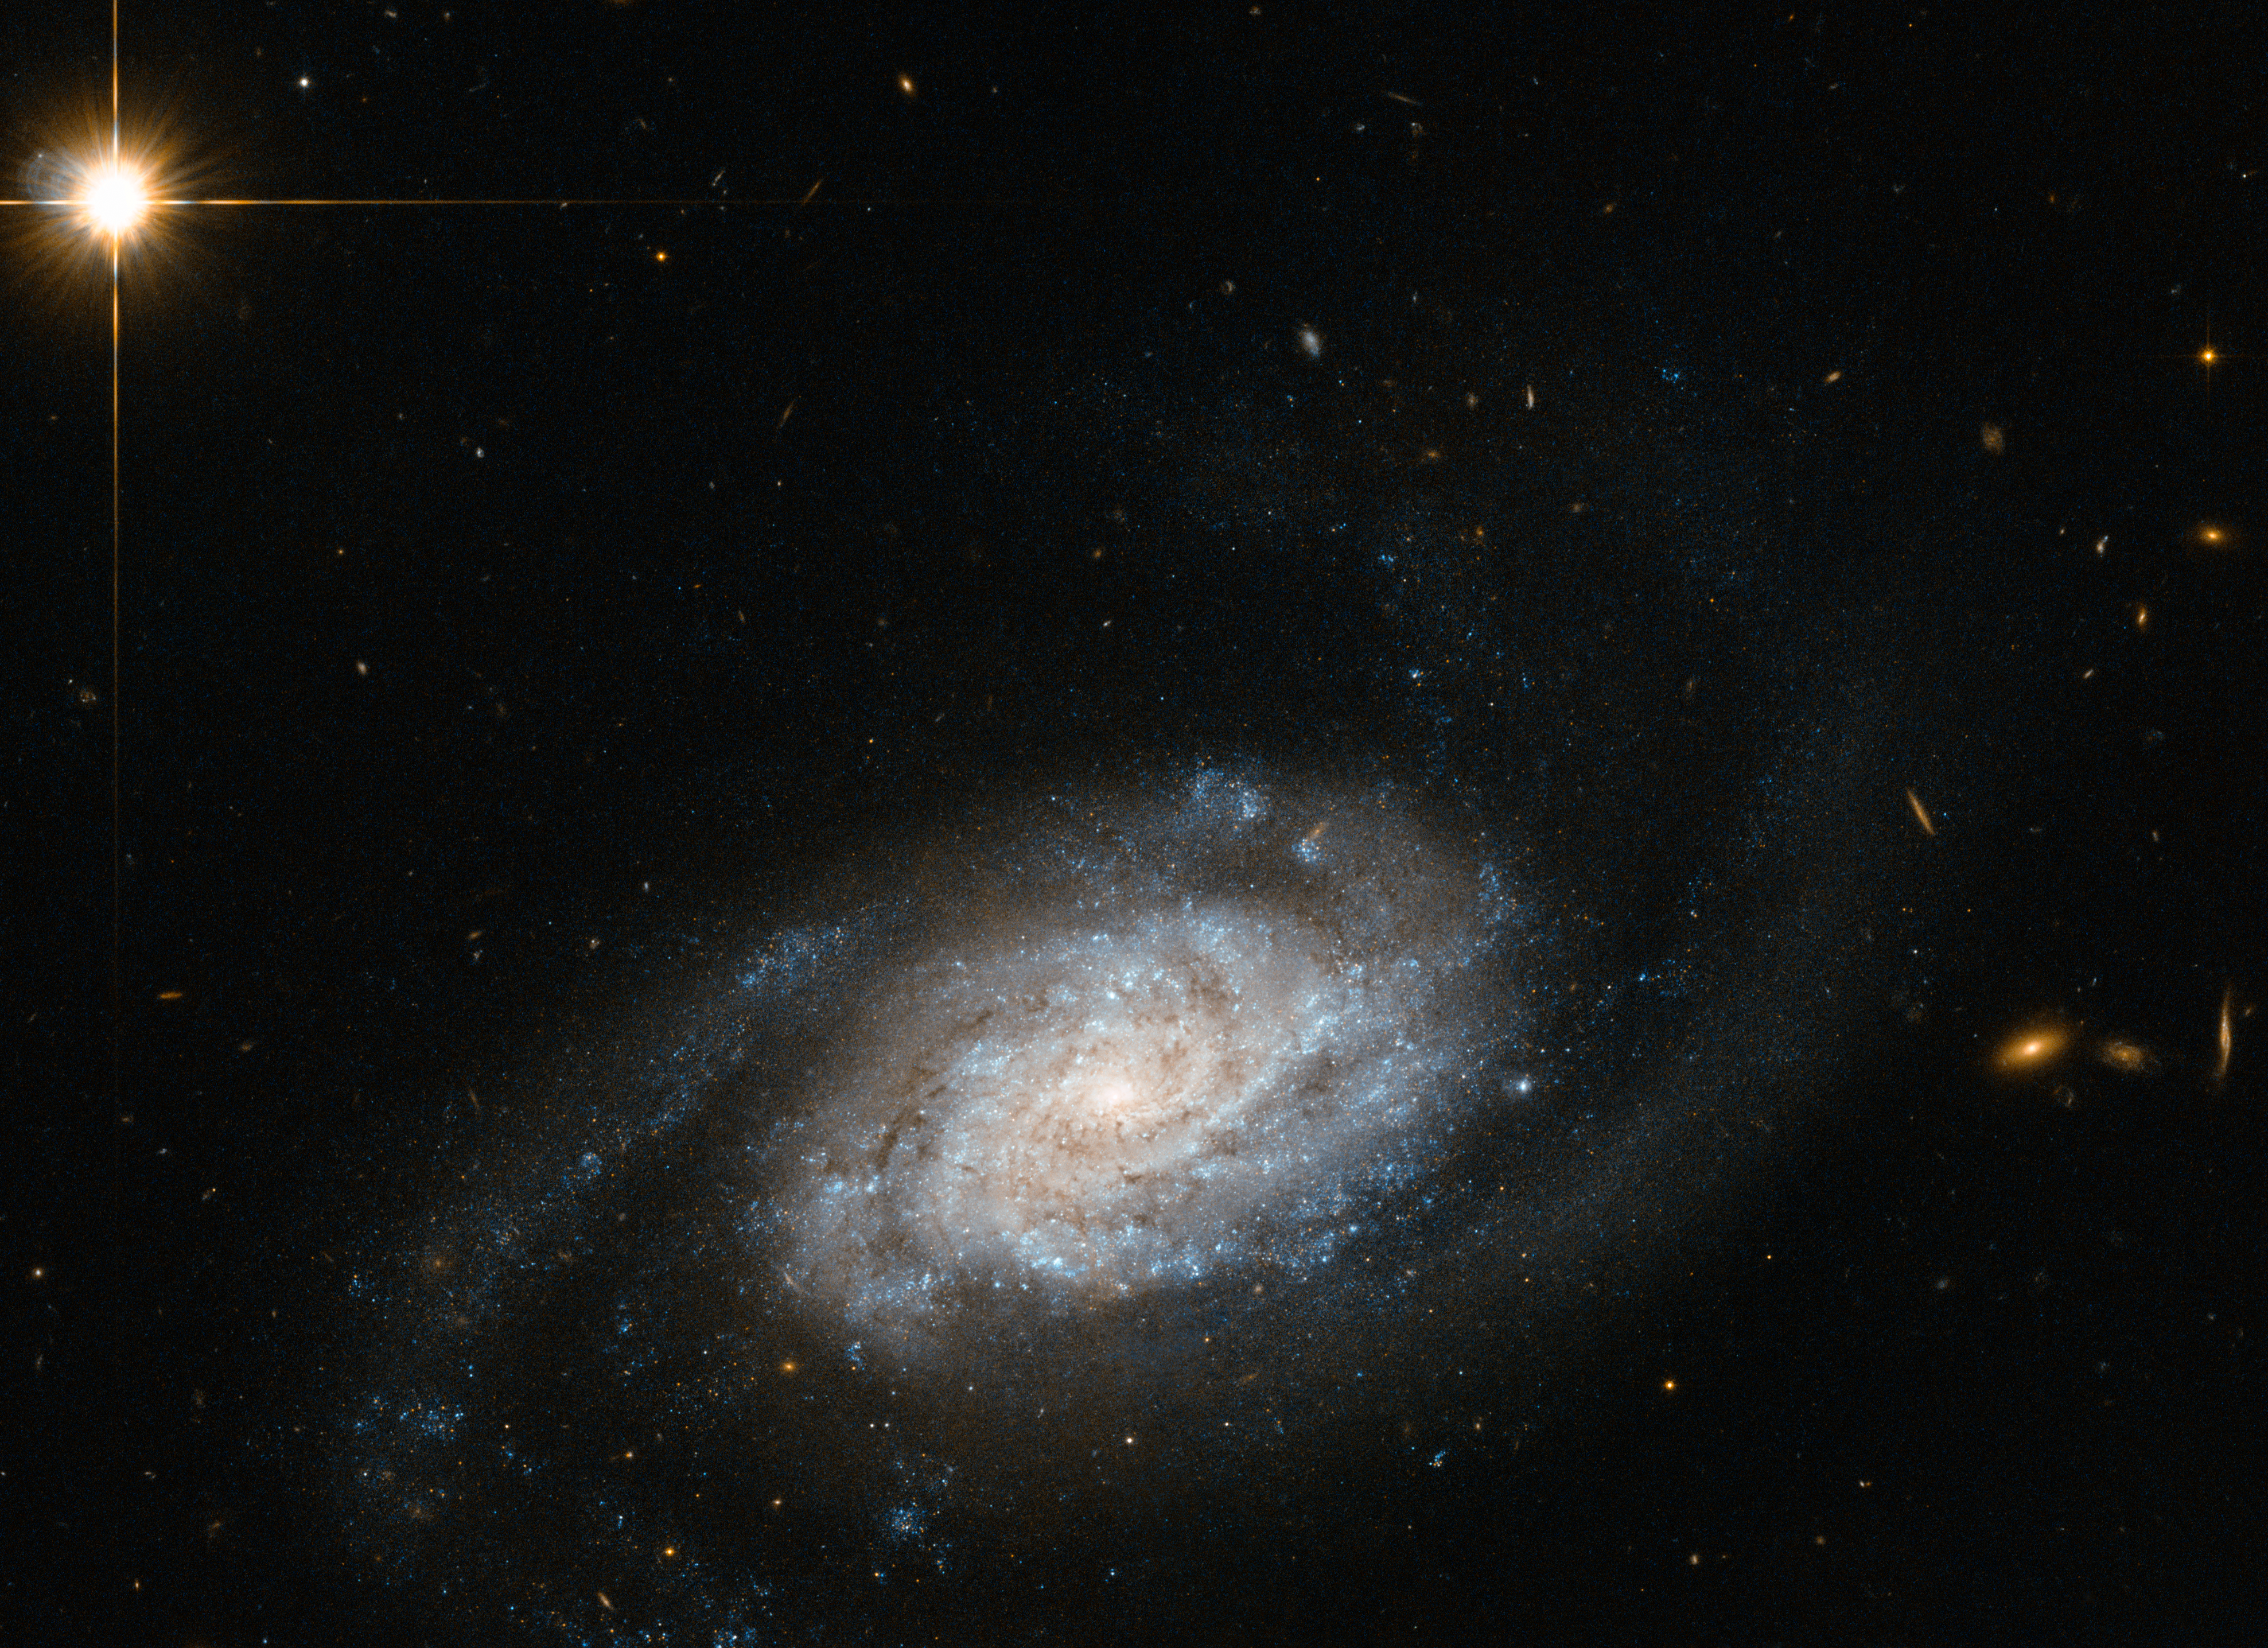

Galaxies spiralling around Leo

Shown here is a spiral galaxy known as NGC 3455, which lies some 65 million light-years away from us in the constellation of Leo (The Lion).

Galaxies are classified into different types according to their structure and appearance. This classification system is known as the Hubble Sequence, named after its creator Edwin Hubble.

In this sequence, NGC 3455 is known as a type SB galaxy — a barred spiral. Barred spiral galaxies account for approximately two thirds of all spirals. Galaxies of this type appear to have a bar of stars slicing through the bulge of stars at their centre. The SB classification is further sub-divided by the appearance of a galaxy's pinwheeling spiral arms; SBa types have more tightly wound arms, whereas SBc types have looser ones. SBb types, such as NGC 3455, lie in between.

NGC 3455 is part of a pair of galaxies — its partner, NGC 3454, lies out of frame. This cosmic duo belong to a group known as the NGC 3370 group, which is in turn one of the Leo II groups, a large collection of galaxies scattered some 30 million light-years to the right of the Virgo cluster.

This new image is from Hubble's Advanced Camera for Surveys (ACS). A version of this image was entered into the Hubble's Hidden Treasures image processing competition by contestant Nick Rose.

Credit: ESA/Hubble & NASA Acknowledgement: Nick Rose